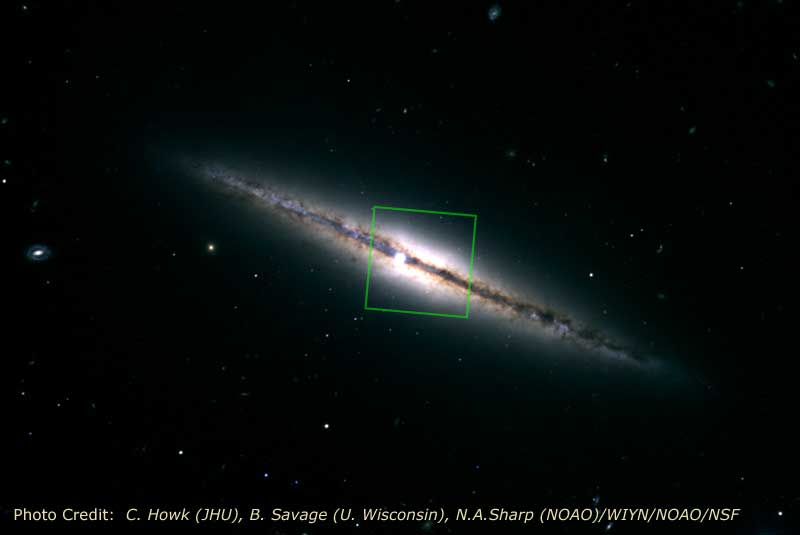

NGC 4013

NOAO Ground-Based, Visible-Light Image of NGC 4013 with Outline of the NICMOS Infrared-Light Image.

Credit: C. Howk (JHU), B. Savage (U. Wisconsin), N.A.Sharp (NOAO)/WIYN/NOAO/NSF